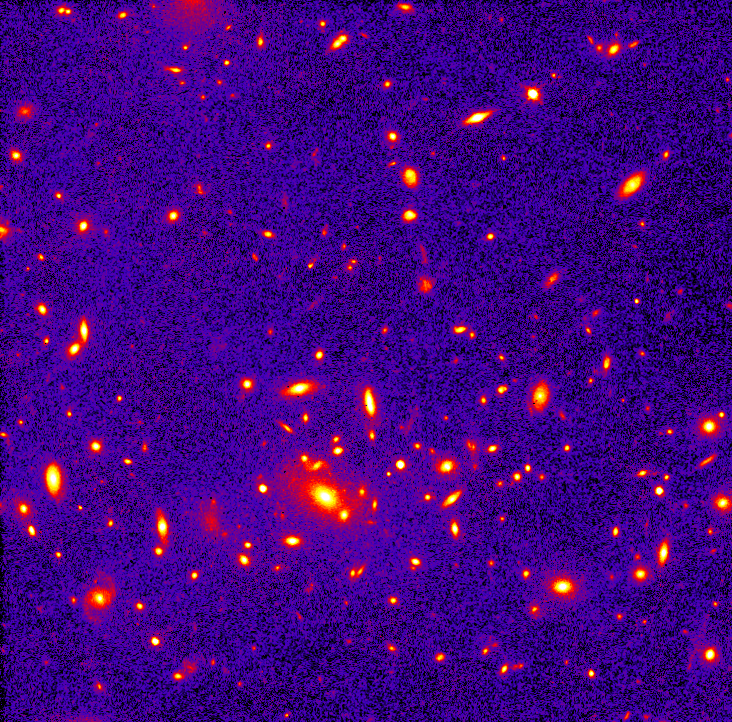

Telescopes Unveil View Of Remote, Massive Galaxy Cluster

This image, taken by the Wide Field and Planetary Camera 2, shows a clearer view of the galaxies in the heart of the cluster. The width of this massive cluster is a few million light-years.

Credit: Megan Donahue (STScI)